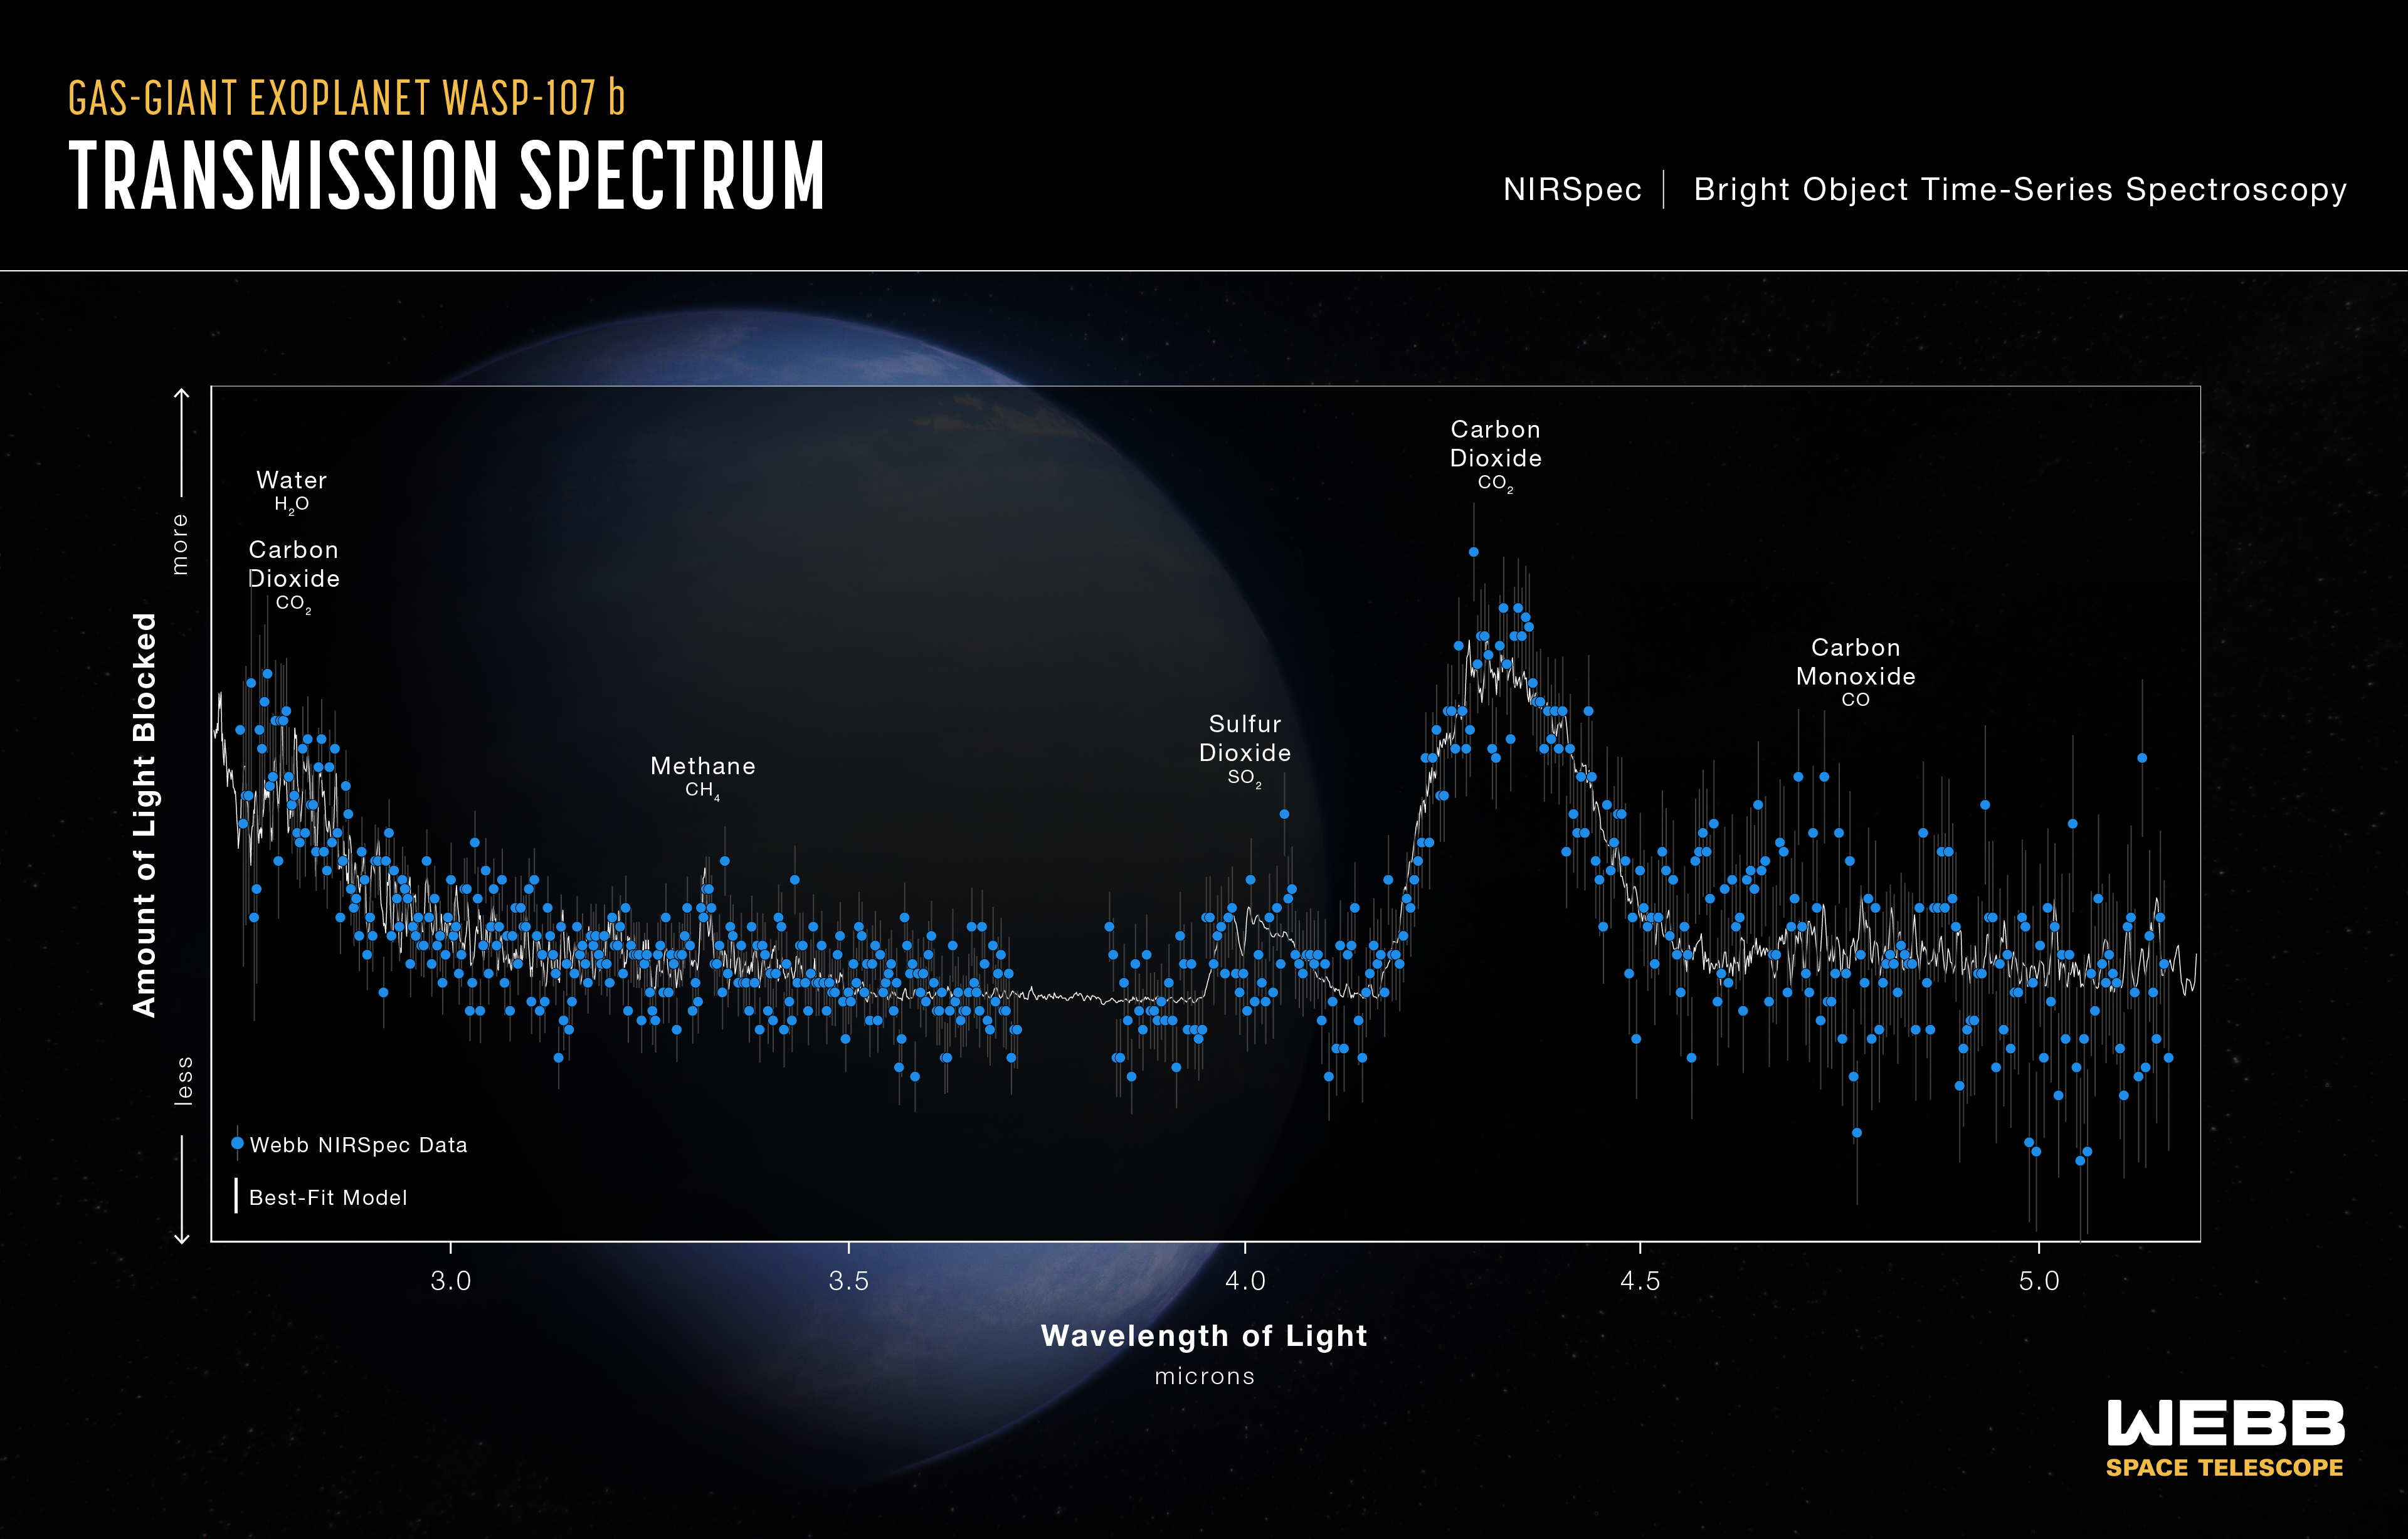

Transmission Spectrum - WASP-107 b (NIRSpec)

This transmission spectrum, captured using Webb’s NIRSpec (Near-Infrared Spectrograph), shows the amounts of different wavelengths (colours) of near-infrared starlight blocked by the atmosphere of the gas-giant exoplanet WASP-107 b .

The spectrum was made by observing the planet-star system for about 8.5 hours before, during, and after the transit as the planet moved across the face of the star.

By comparing the brightness of light filtered through the planet’s atmosphere (transmitted light) to unfiltered starlight, it is possible to calculate the amount of each wavelength that is blocked by the atmosphere. Since each molecule absorbs a unique combination of wavelengths, the transmission spectrum can be used to constrain the abundances of various gases.

This spectrum shows clear evidence for water (H2O), carbon dioxide (CO2), carbon monoxide (CO), methane (CH4), and sulphur dioxide (SO2) in the planet’s atmosphere, allowing researchers to estimate its interior temperature and the mass of its core.

Credit: NASA, ESA, CSA, R. Crawford (STScI)